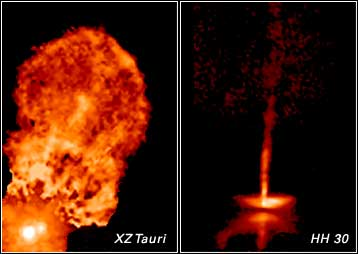

Movies from Hubble Show the Changing Faces of Infant Stars

Time-lapse movies made from a series of pictures taken by NASA/ESA Hubble Space Telescope are showing astronomers that young stars and their surroundings can change dramatically in just weeks or months. As with most children, a picture of these youngsters taken today won't look the same as one snapped a few months from now. The movies show jets of gas plowing into space at hundreds of thousands of miles (or kilometres) per hour and moving shadows billions of miles in size.

The young star systems featured in the movies, XZ Tauri and HH 30, reside about 450 light-years from Earth in the Taurus-Auriga molecular cloud, one of the nearest stellar nurseries to our planet. Both systems are probably less than a million years old, making them relative newborns, given that stars typically live for billions of years. Hubble's Wide Field and Planetary Camera 2 first observed them in 1995. Those views were so intriguing that additional images were taken in 1998, 1999, and 2000. The pictures were then combined into movies that document startling activity in the early stages of a star's life.

Credit: NASA, John Krist ( Space Telescope Science Institute), Karl Stapelfeldt (Jet Propulsion Laboratory), Jeff Hester (Arizona State University), Chris Burrows (European Space Agency/ Space Telescope Science Institute)